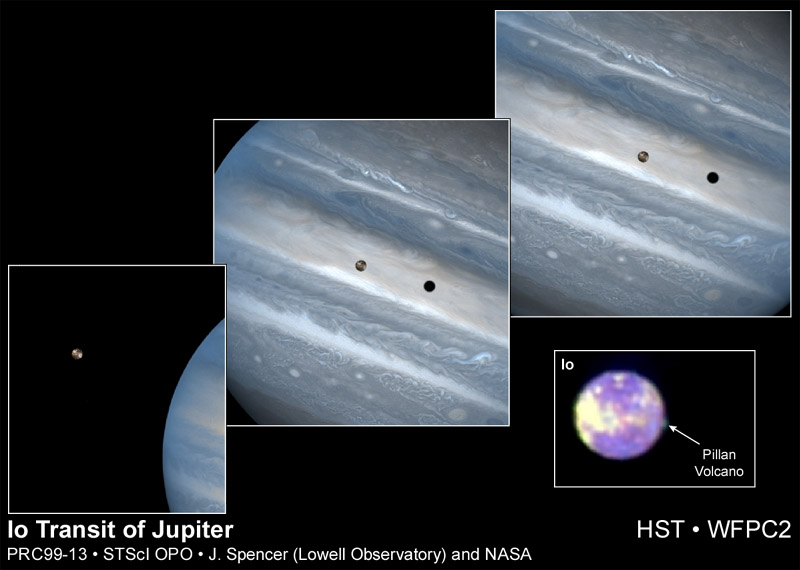

Io Transit of Jupiter

While hunting for volcanic plumes on Io, the NASA/ESA Hubble Space Telescope captured these images of the volatile moon sweeping across the giant face of Jupiter. Only a few weeks before these dramatic images were taken, the orbiting telescope snapped a portrait of one of Io's volcanoes spewing sulfur dioxide 'snow.'

These stunning images of the planetary duo are being released to commemorate the ninth anniversary of the Hubble telescope's launch on April 24, 1990. All of these images were taken with the Wide Field and Planetary Camera 2.

Credit: J. Spencer (Lowell Observatory) and NASA/ESA